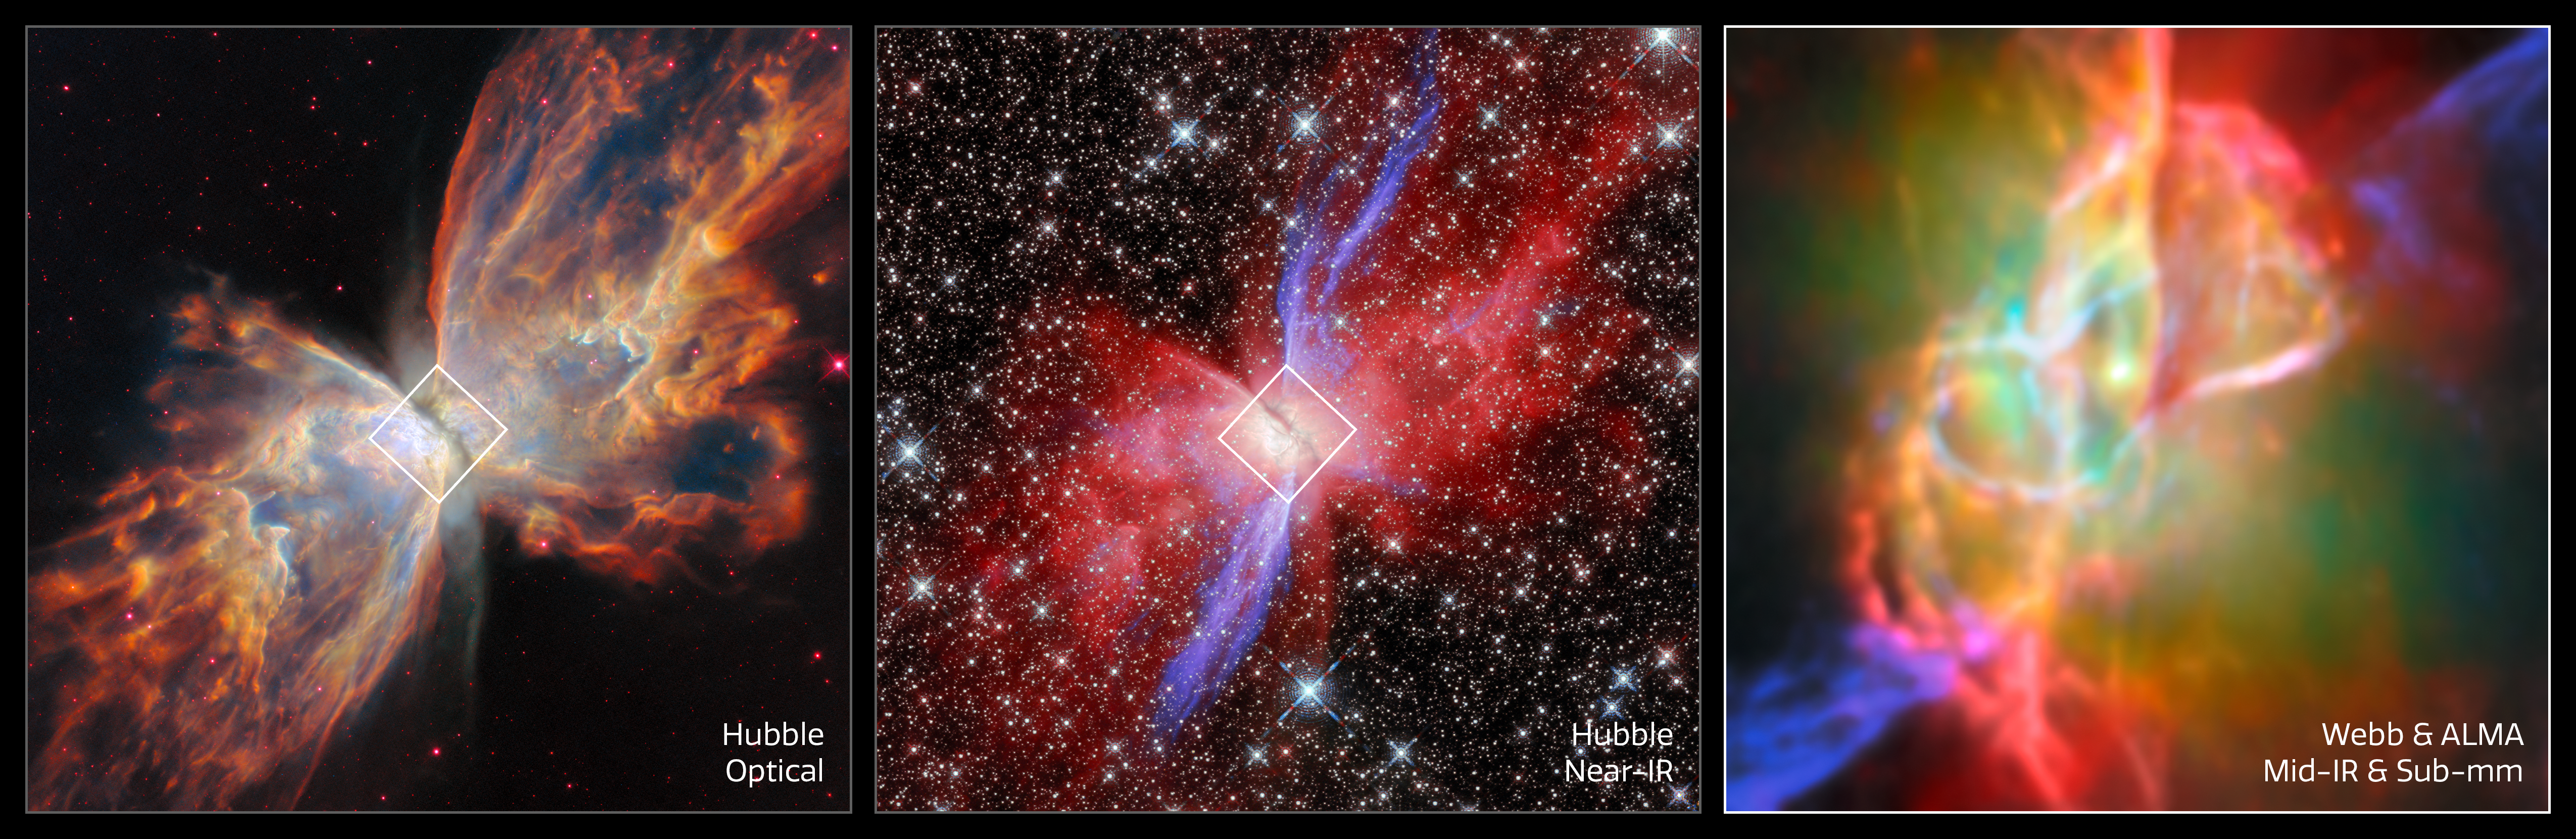

Butterfly Nebula NGC 6302 (Hubble and Webb + ALMA images, side by side)

This image set showcases three views of the Butterfly Nebula, also called NGC 6302. The Butterfly Nebula, located about 3400 light-years away in the constellation Scorpius, is one of the best-studied planetary nebulae in our galaxy.

Planetary nebulae are among the most beautiful and most elusive creatures in the cosmic zoo. These nebulae form when stars with masses between about 0.8 and 8 times the mass of the Sun shed most of their mass at the end of their lives. The planetary nebula phase is fleeting, lasting only about 20 000 years.

The Butterfly Nebula is a bipolar nebula, meaning that it has two lobes that spread in opposite directions, forming the ‘wings’ of the butterfly. A dark band of dusty gas poses as the butterfly’s ‘body’. This band is actually a doughnut-shaped torus that’s being viewed from the side, hiding the nebula’s central star - the ancient core of a Sun-like star that energises the nebula and causes it to glow. The dusty doughnut may be responsible for the nebula’s insectoid shape by preventing gas from flowing outward from the star equally in all directions.

The first and second of the three images shown here highlight the bipolar nature of the Butterfly Nebula in optical and near-infrared light captured by the NASA/ESA Hubble Space Telescope. The new Webb image on the right zooms in on the centre of the Butterfly Nebula and its dusty torus, providing an unprecedented view of its complex structure. The Webb data are supplemented with data from the Atacama Large Millimetre/submillimetre Array, a powerful network of radio dishes.

While the nebula’s central star is blanketed with thick, dusty gas at optical wavelengths, Webb’s infrared capabilities reveal the central star and show the doughnut-shaped torus and interconnected bubbles of dusty gas that surround it.

Credit: ESA/Webb, NASA & CSA, M. Matsuura, J. Kastner, K. Noll, ALMA (ESO/NAOJ/NRAO), N. Hirano, M. Zamani (ESA/Webb)